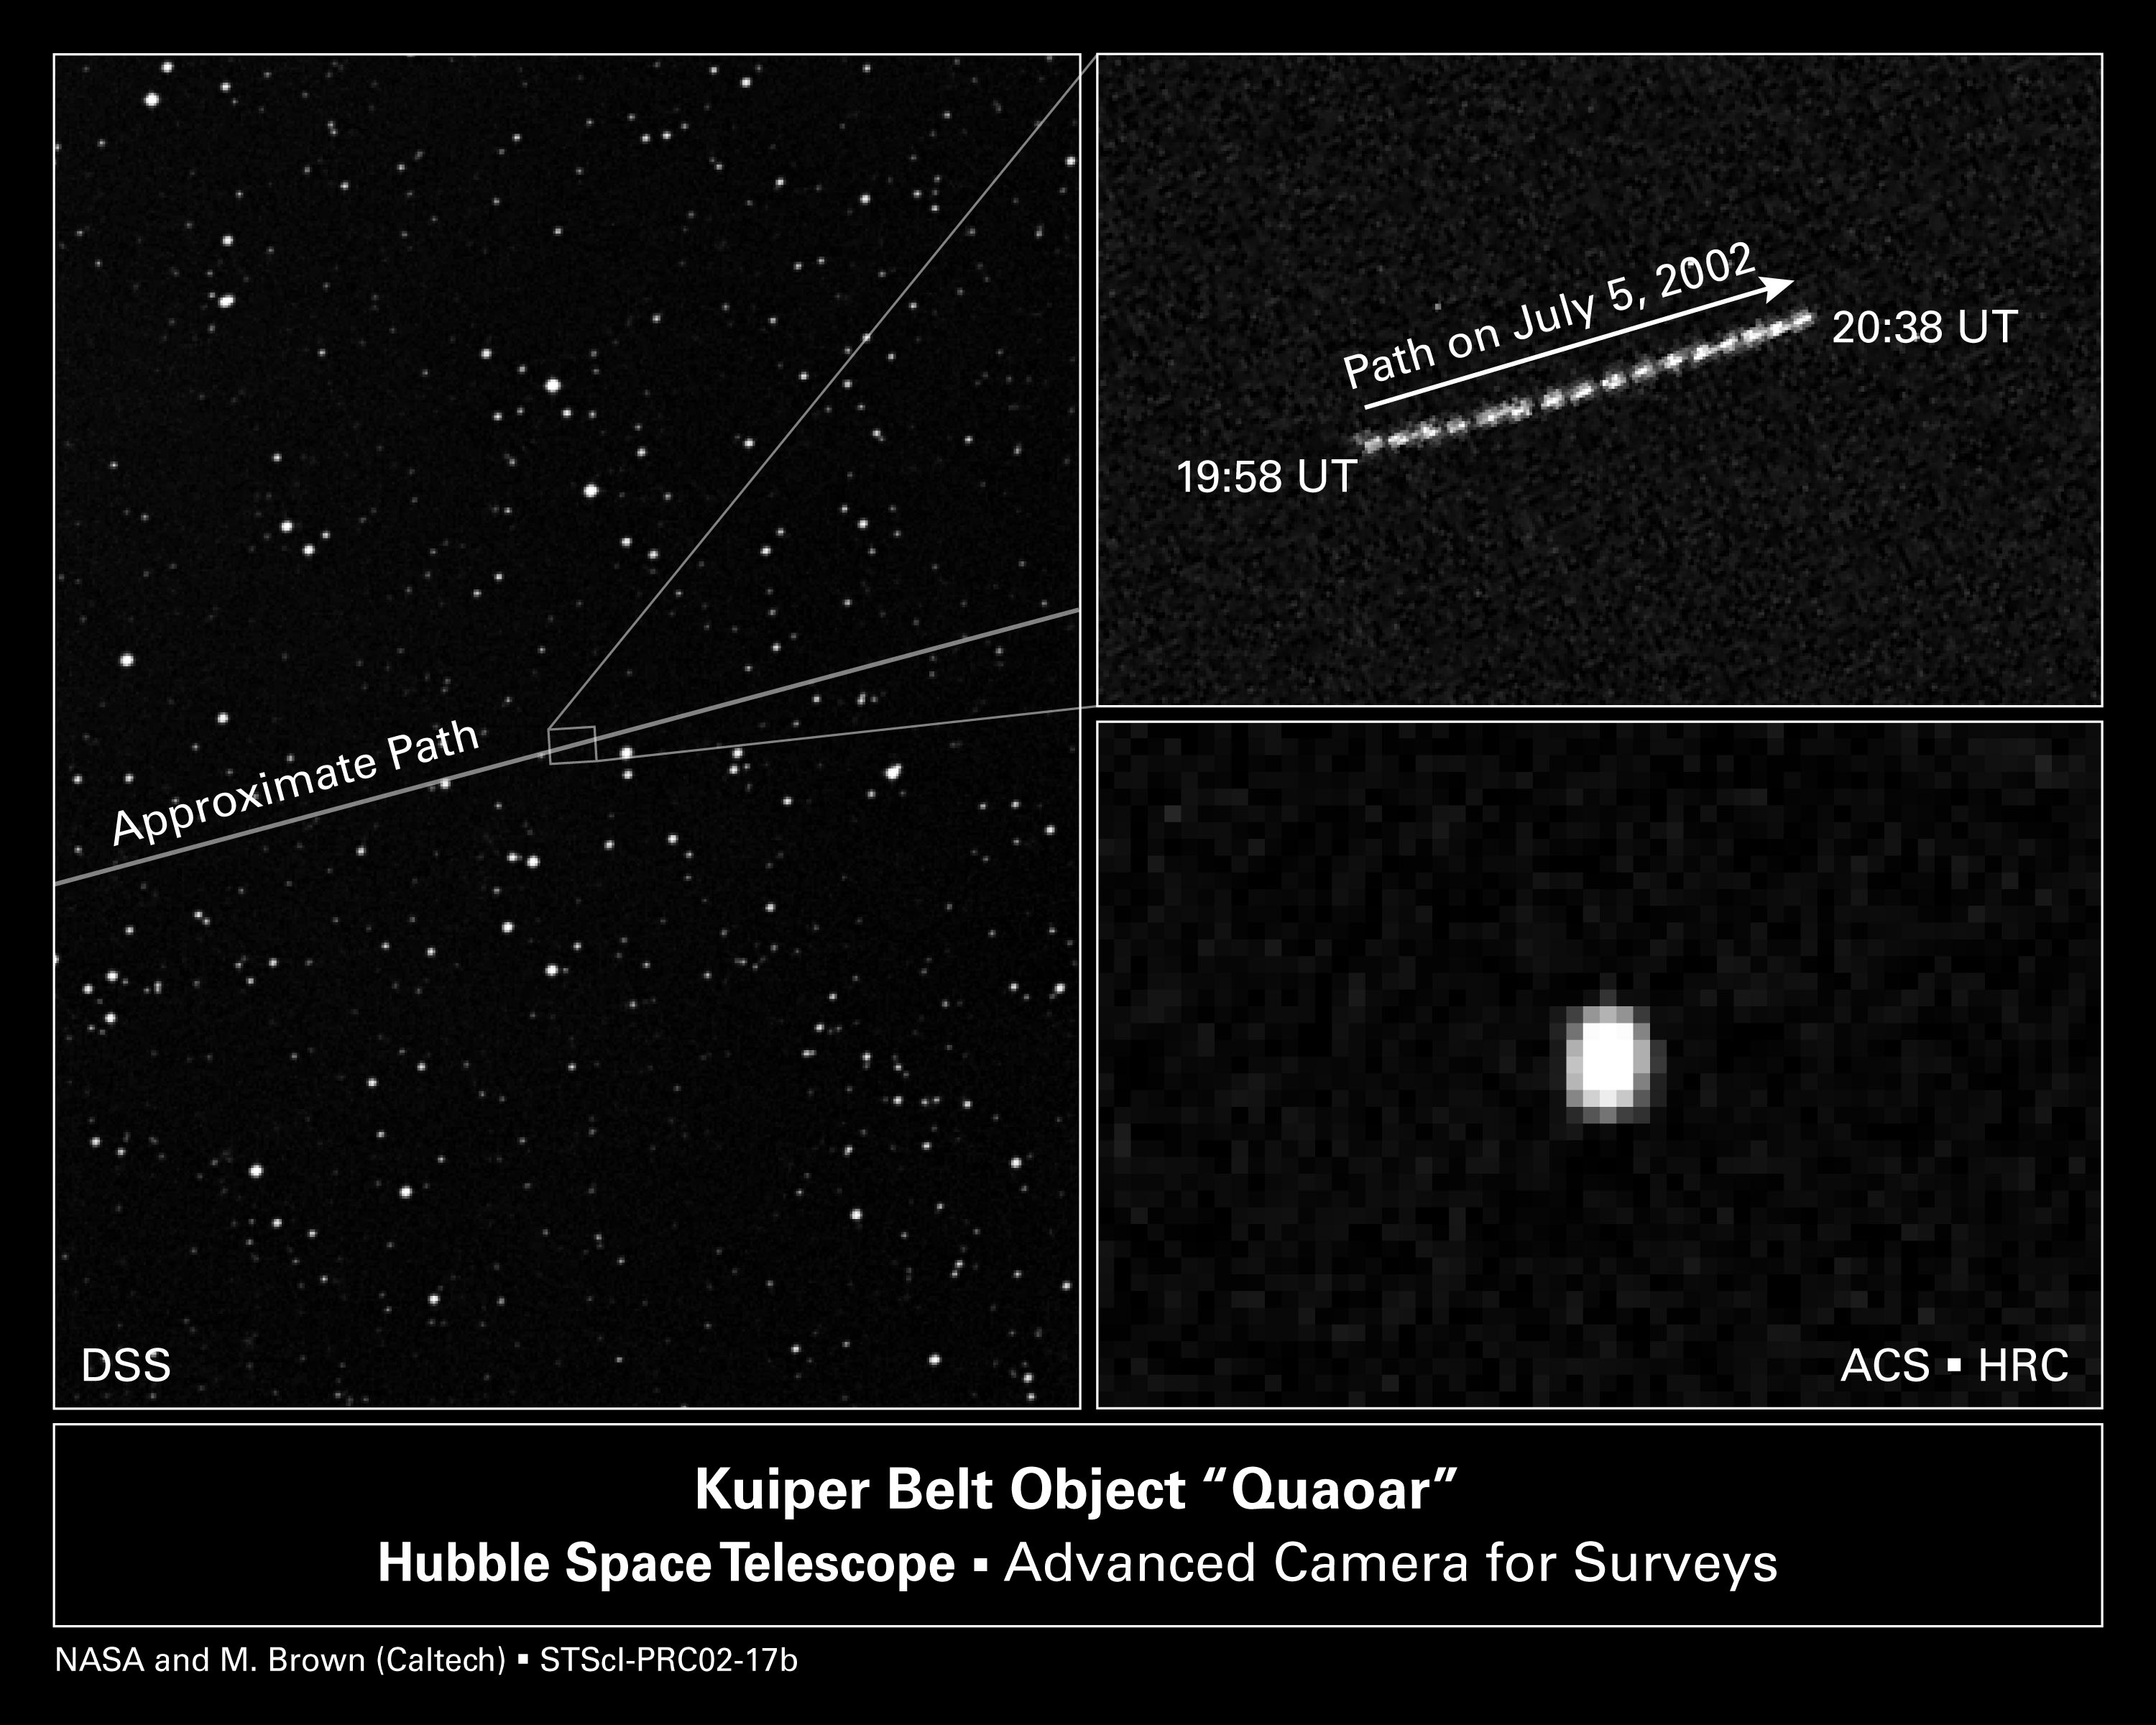

ACS images of KBO 'quaoar'

With the help of the NASA/ESA Hubble Space Telescope, astronomers have determined that 2002 LM60, an icy Kuiper belt object dubbed 'Quaoar', by its discoverers, is the largest body found in the solar system since the discovery of Pluto 72 years ago. Quaoar (pronounced kwa-whar) is about half the size of Pluto. Like Pluto, Quaoar dwells in the Kuiper belt, an icy debris field of comet-like bodies extending 7 billion miles (more than 11 billion kilometres) beyond Neptune's orbit.

Credit: NASA/ESA and M. Brown (Caltech)